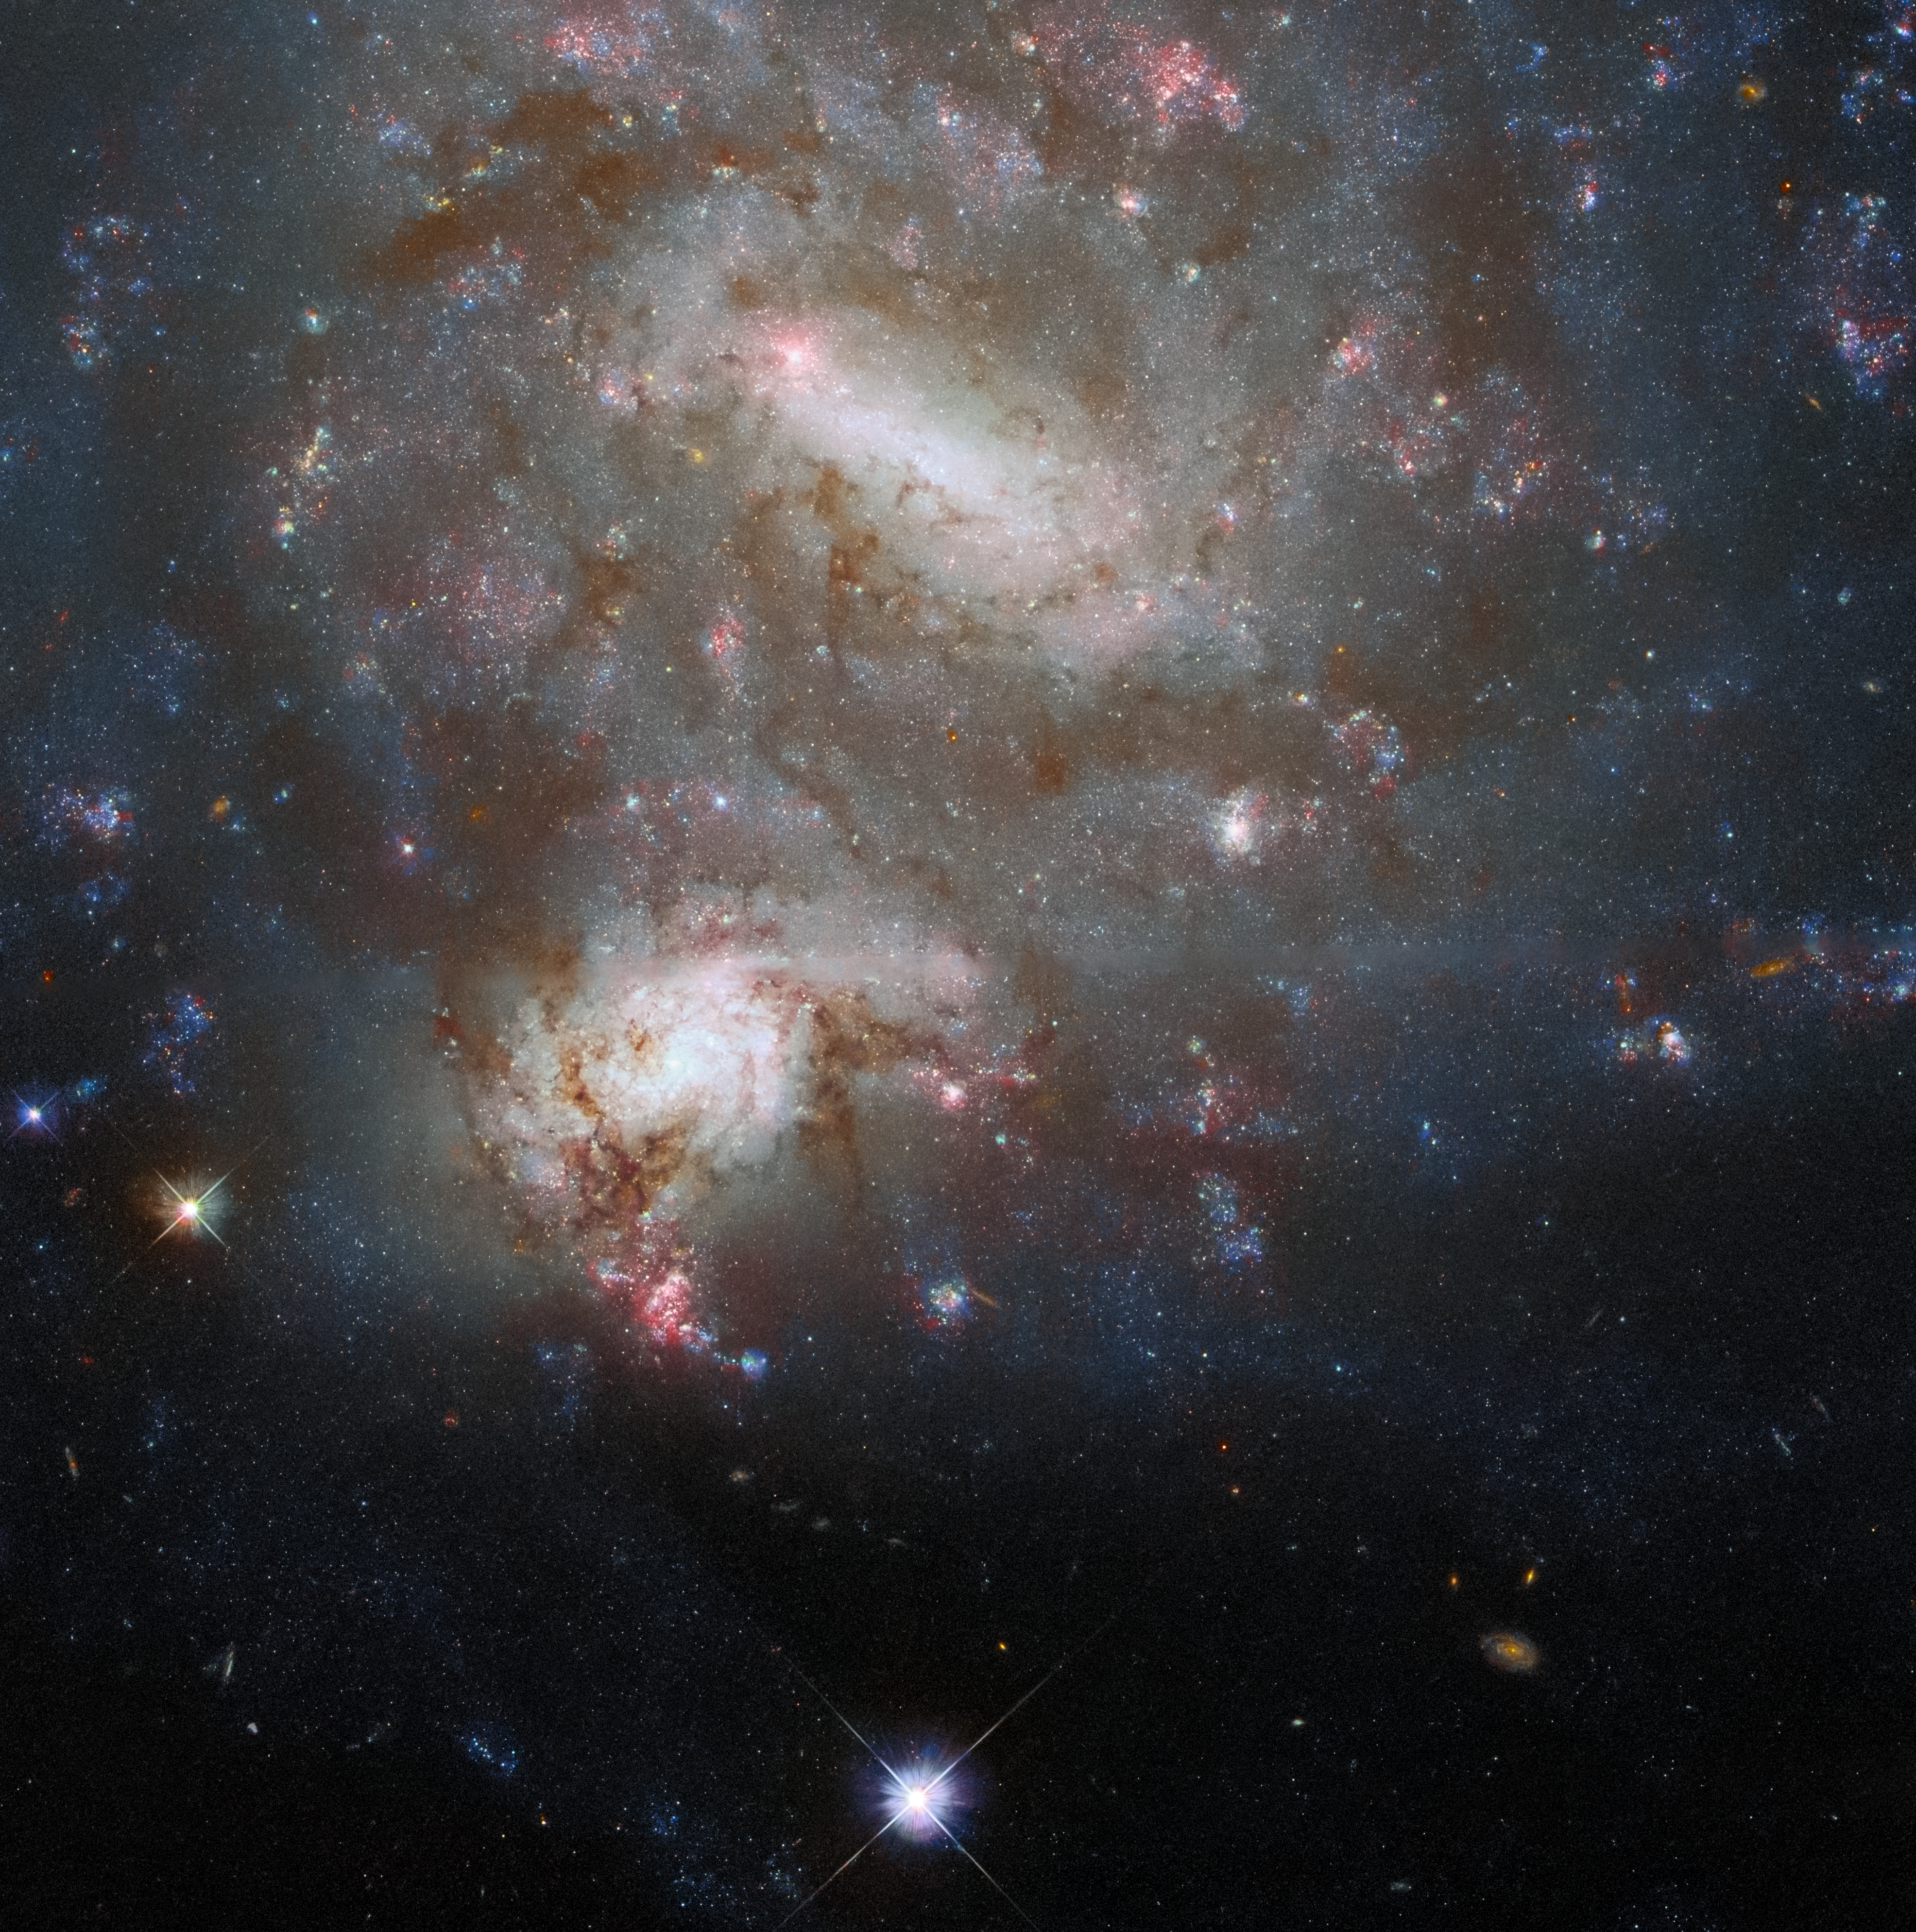

Not-So-Close Encounter

The twin galaxies NGC 4496A and NGC 4496B dominate the frame in this image from the NASA/ESA Hubble Space Telescope. Both galaxies lie in the constellation Virgo, but despite appearing side-by-side in this image they are at vastly different distances from both Earth and one another. NGC 4496A is 47 million light-years from Earth while NGC 4496B is 212 million light-years away. The enormous distances between the two galaxies mean that the two cannot interact, and they only appear to overlap owing to a chance alignment.

Chance galactic alignments such as this provide astronomers with the opportunity to delve into the distribution of dust in these galaxies. Galactic dust adds to the beauty of astronomical images — it can be seen in this image as the dark tendrils threading through both NGC 4496A and NGC 4496B — but it also complicates astronomers’ observations. Dust absorbs starlight, making stars seem dimmer and shifting their light towards longer wavelengths, a process that astronomers refer to as “reddening” (not the same thing as redshift). By carefully measuring how starlight from background galaxies is affected by dust in intervening galaxies, astronomers can map out where the dust is in the foreground galaxy’s spiral arms. The resulting “dust maps” help astronomers calibrate measurements of everything from cosmological distances to the types of stars populating galaxies.

Credit: ESA/Hubble & NASA, T. Boeker, B. Holwerda, Dark Energy Survey, DOE, FNAL/DECam, CTIO/NOIRLab/NSF/AURA, SDSS Acknowledgement: R. Colombari